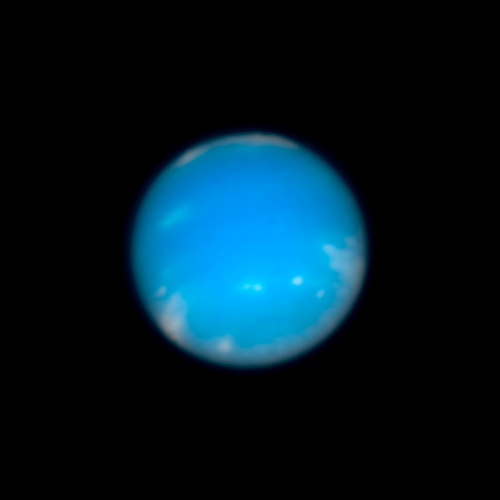

Hubble image of Neptune

Hubble snapped this colour image of Neptune on August 19, 2009.

Credit: NASA, ESA, and M. Showalter (SETI Institute)